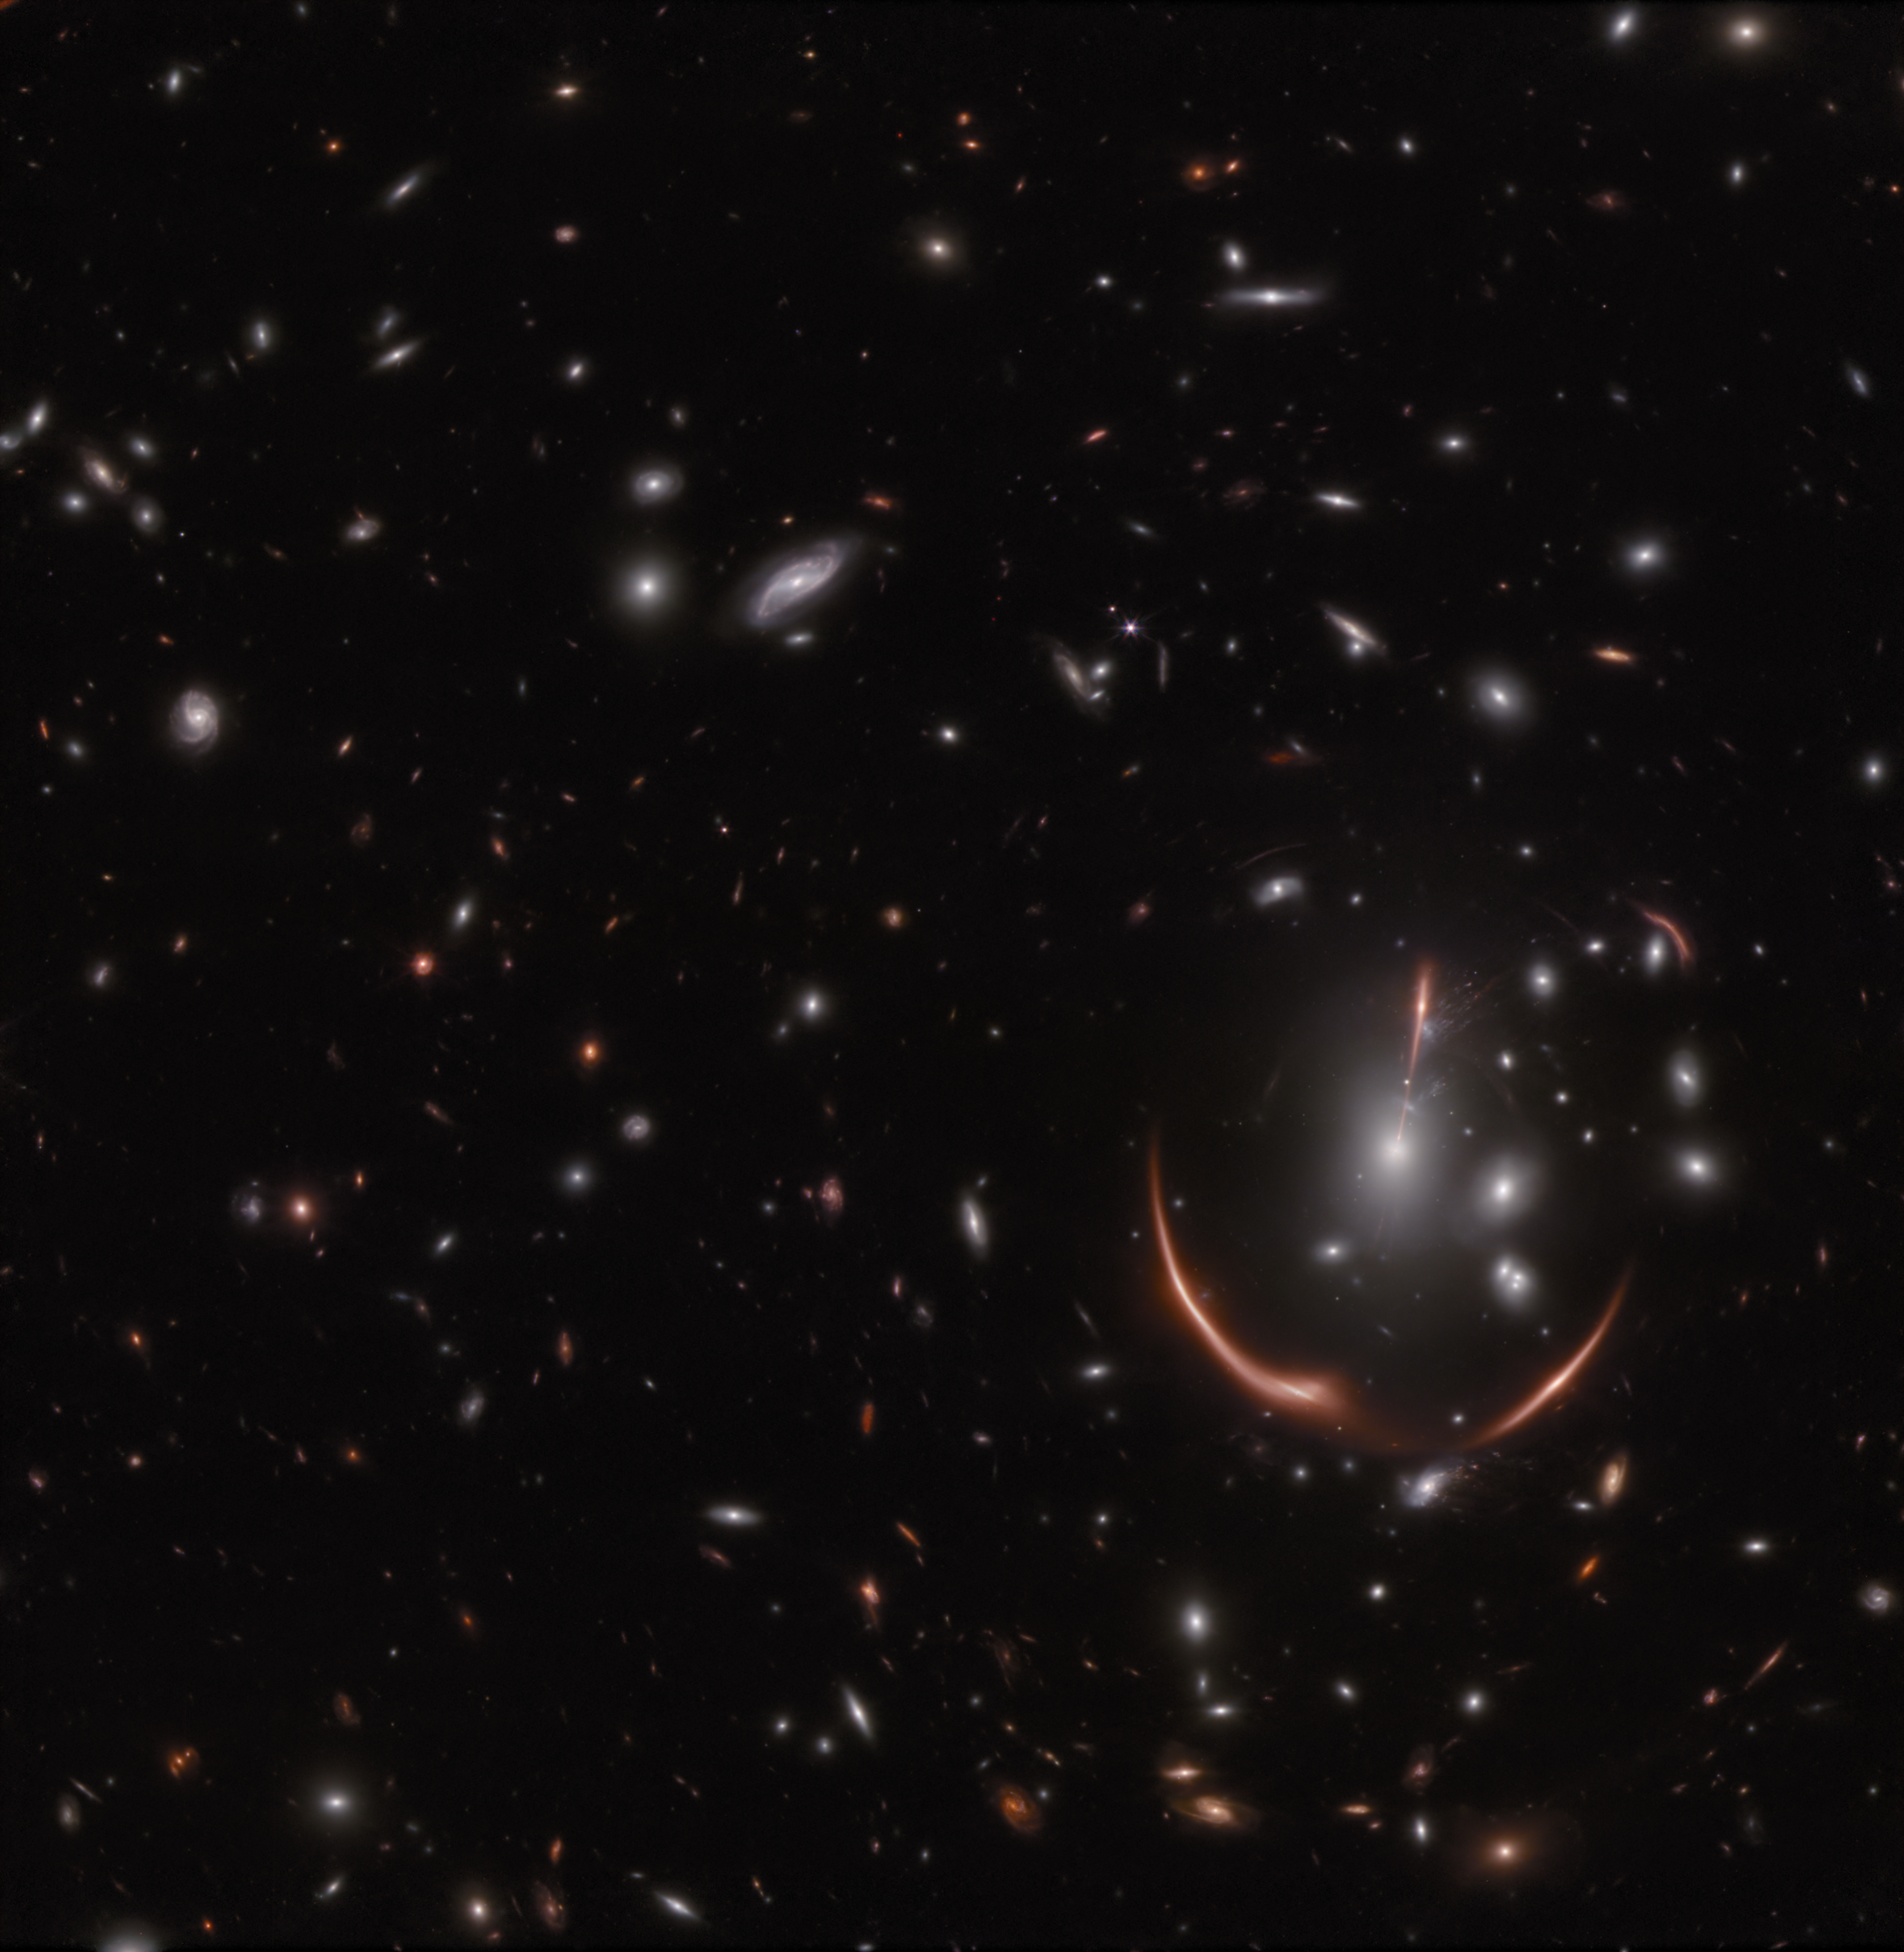

Webb spots a second lensed supernova in a distant galaxy

In November 2023, the NASA/ESA/CSA James Webb Space Telescope observed a massive cluster of galaxies named MACS J0138.0-2155. Through an effect called gravitational lensing, first predicted by Albert Einstein, a distant galaxy named MRG-M0138 appears warped by the powerful gravity of the intervening galaxy cluster. In addition to warping and magnifying the distant galaxy, the gravitational lensing effect caused by MACS J0138 produces five different images of MRG-M0138.

In 2019, astronomers announced the surprising find that a stellar explosion, or supernova, had occurred within MRG-M0138, as seen in images from the NASA/ESA Hubble Space Telescope taken in 2016. When another group of astronomers examined the 2023 Webb images, they were astonished to find that seven years later, the same galaxy is home to a second supernova.

Two images of the supernova are seen in the Webb NIRCam (Near-Infrared Camera) image above (see the annotated image that highlights these features version here), but an additional supernova image is expected to become visible around 2035.

In this image blue represents light at 1.15 and 1.5 microns (F115W+F150), green is 2.0 and 2.77 microns (F200W+277W), and red is 3.56 and 4.44 microns (F356W + F444W).

These observations were taken as part of Webb Director’s Discretionary Time program 6549.

Note: This post highlights data from Webb science in progress, which has not yet been through the peer-review process.

Credit: NASA, ESA, CSA, STScI, Justin Pierel (STScI) and Andrew Newman (Carnegie Institution for Science)